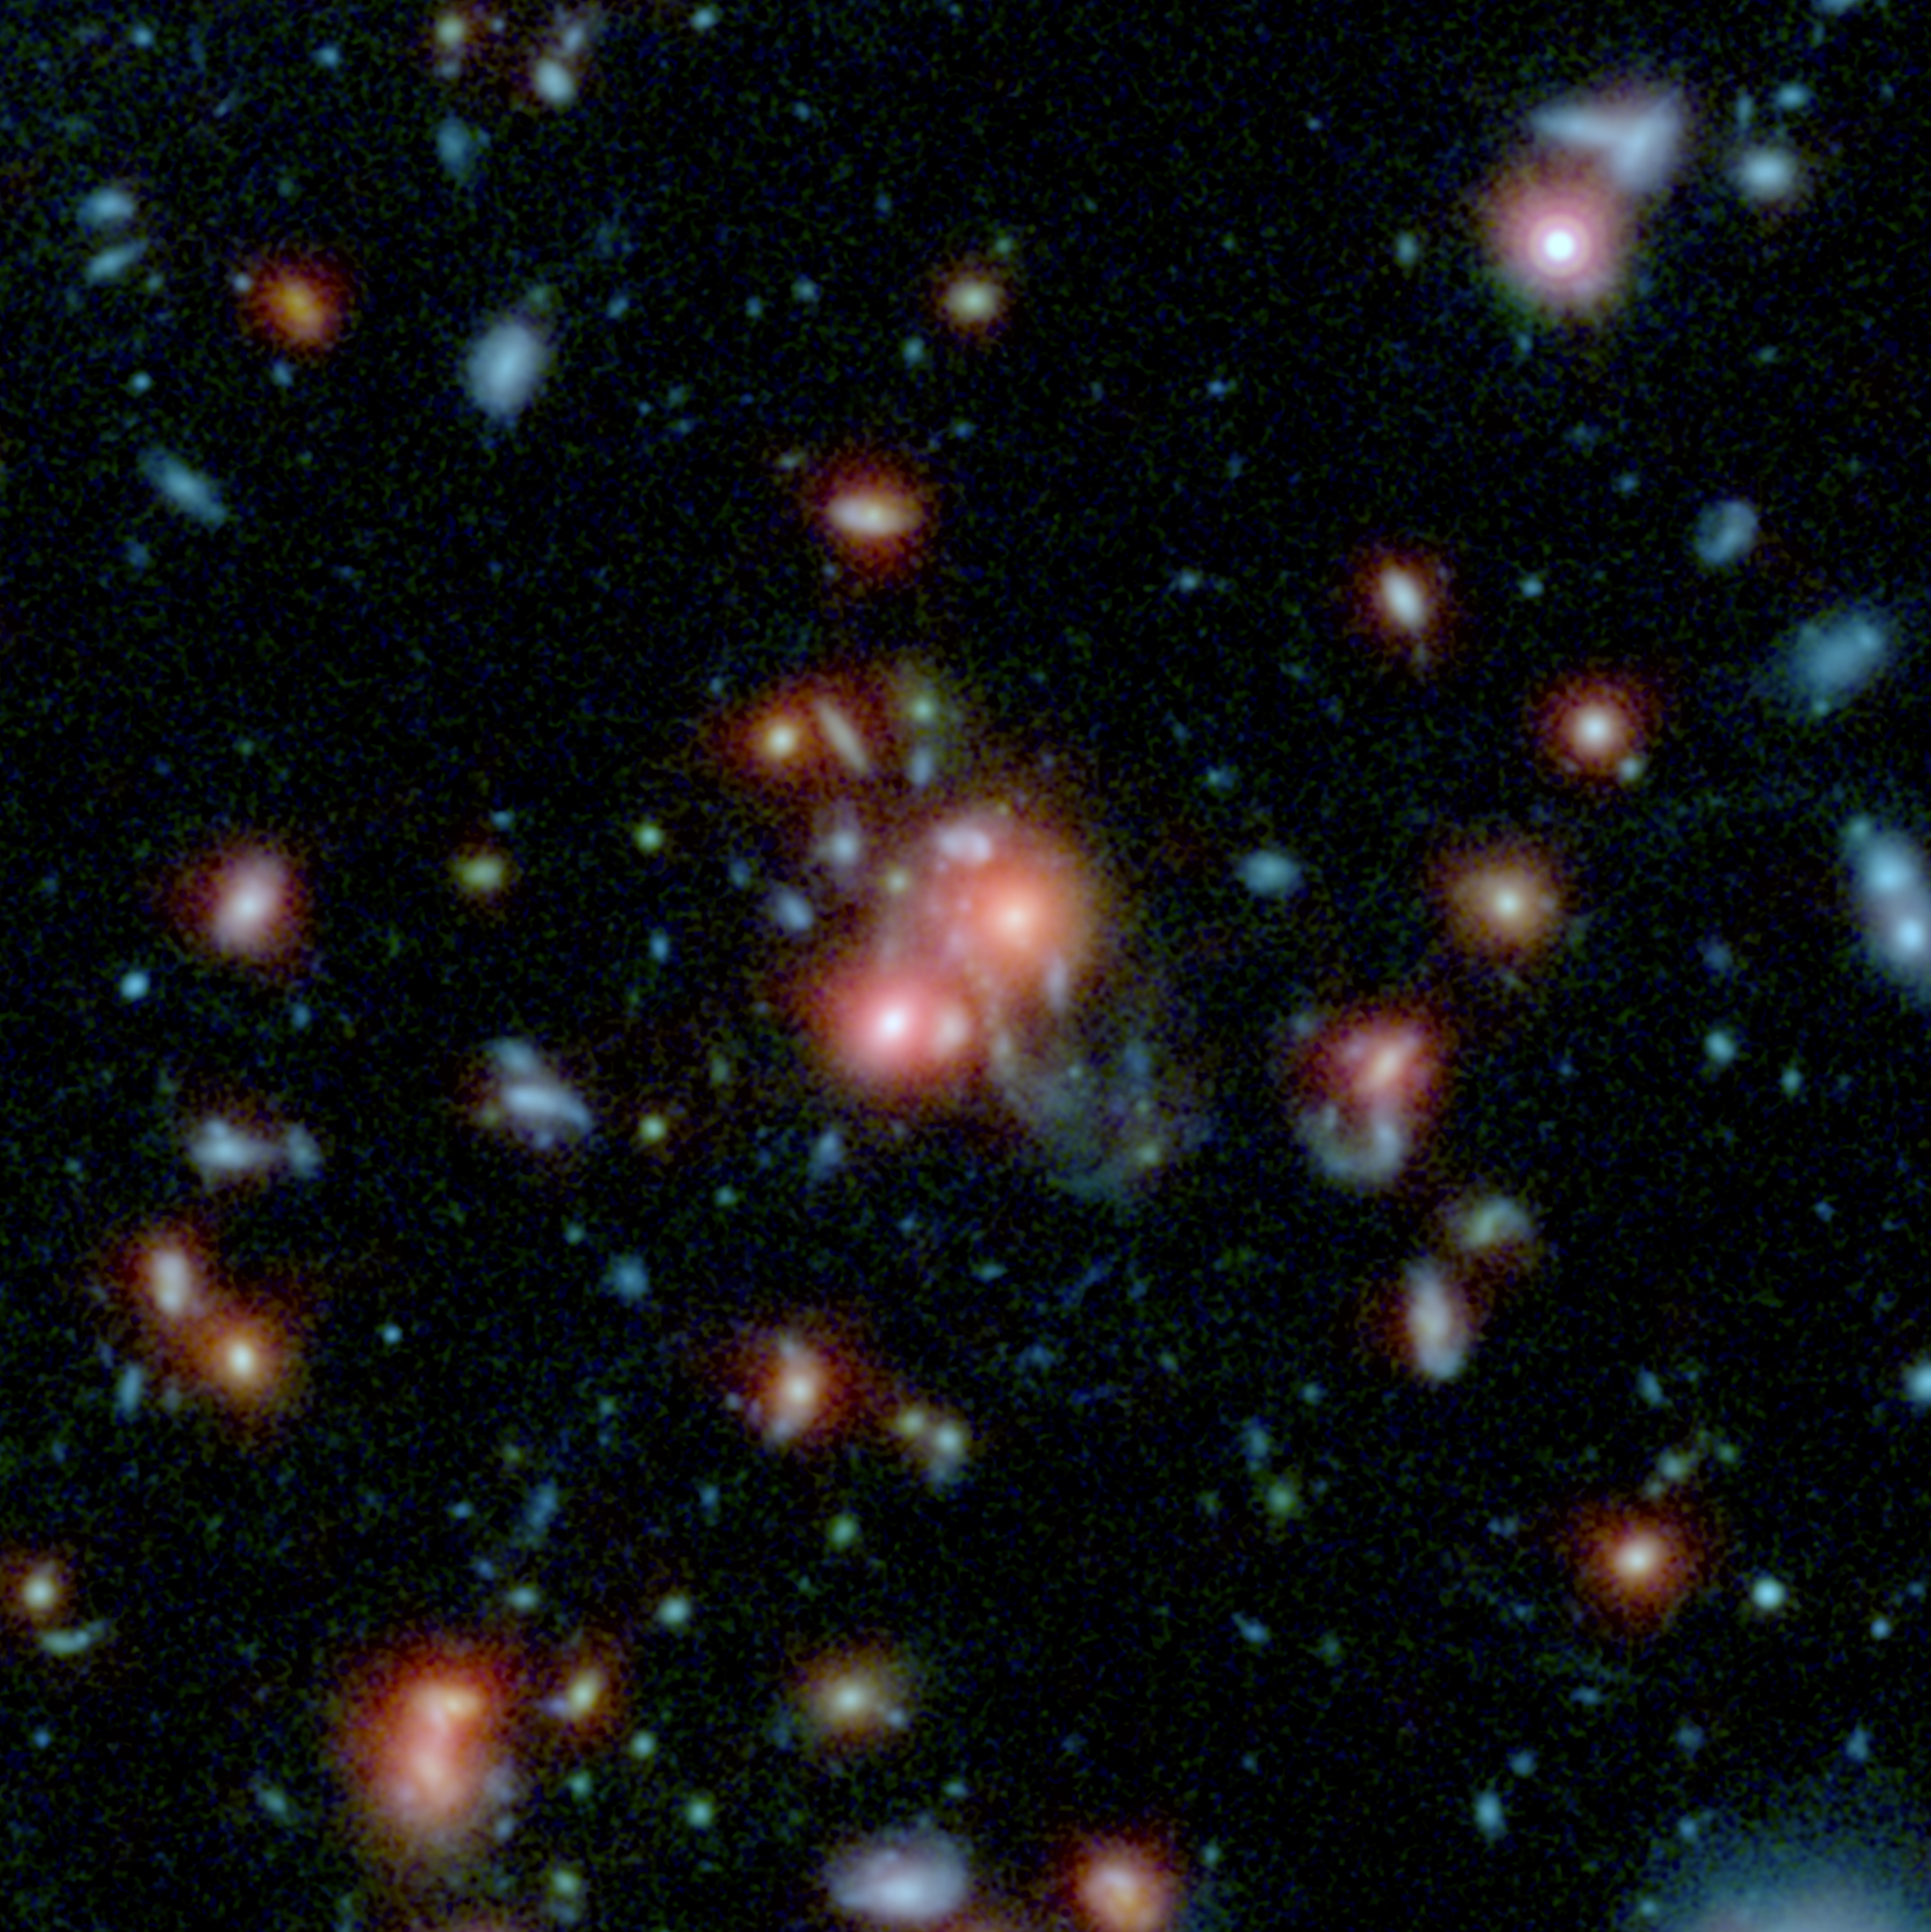

Image of the galaxy cluster SpARCS1049

This image, using data from Spitzer and the Hubble Space Telescope, shows the galaxy cluster SpARCS1049.

Credit: NASA/STScI/ESA/JPL-Caltech/McGill